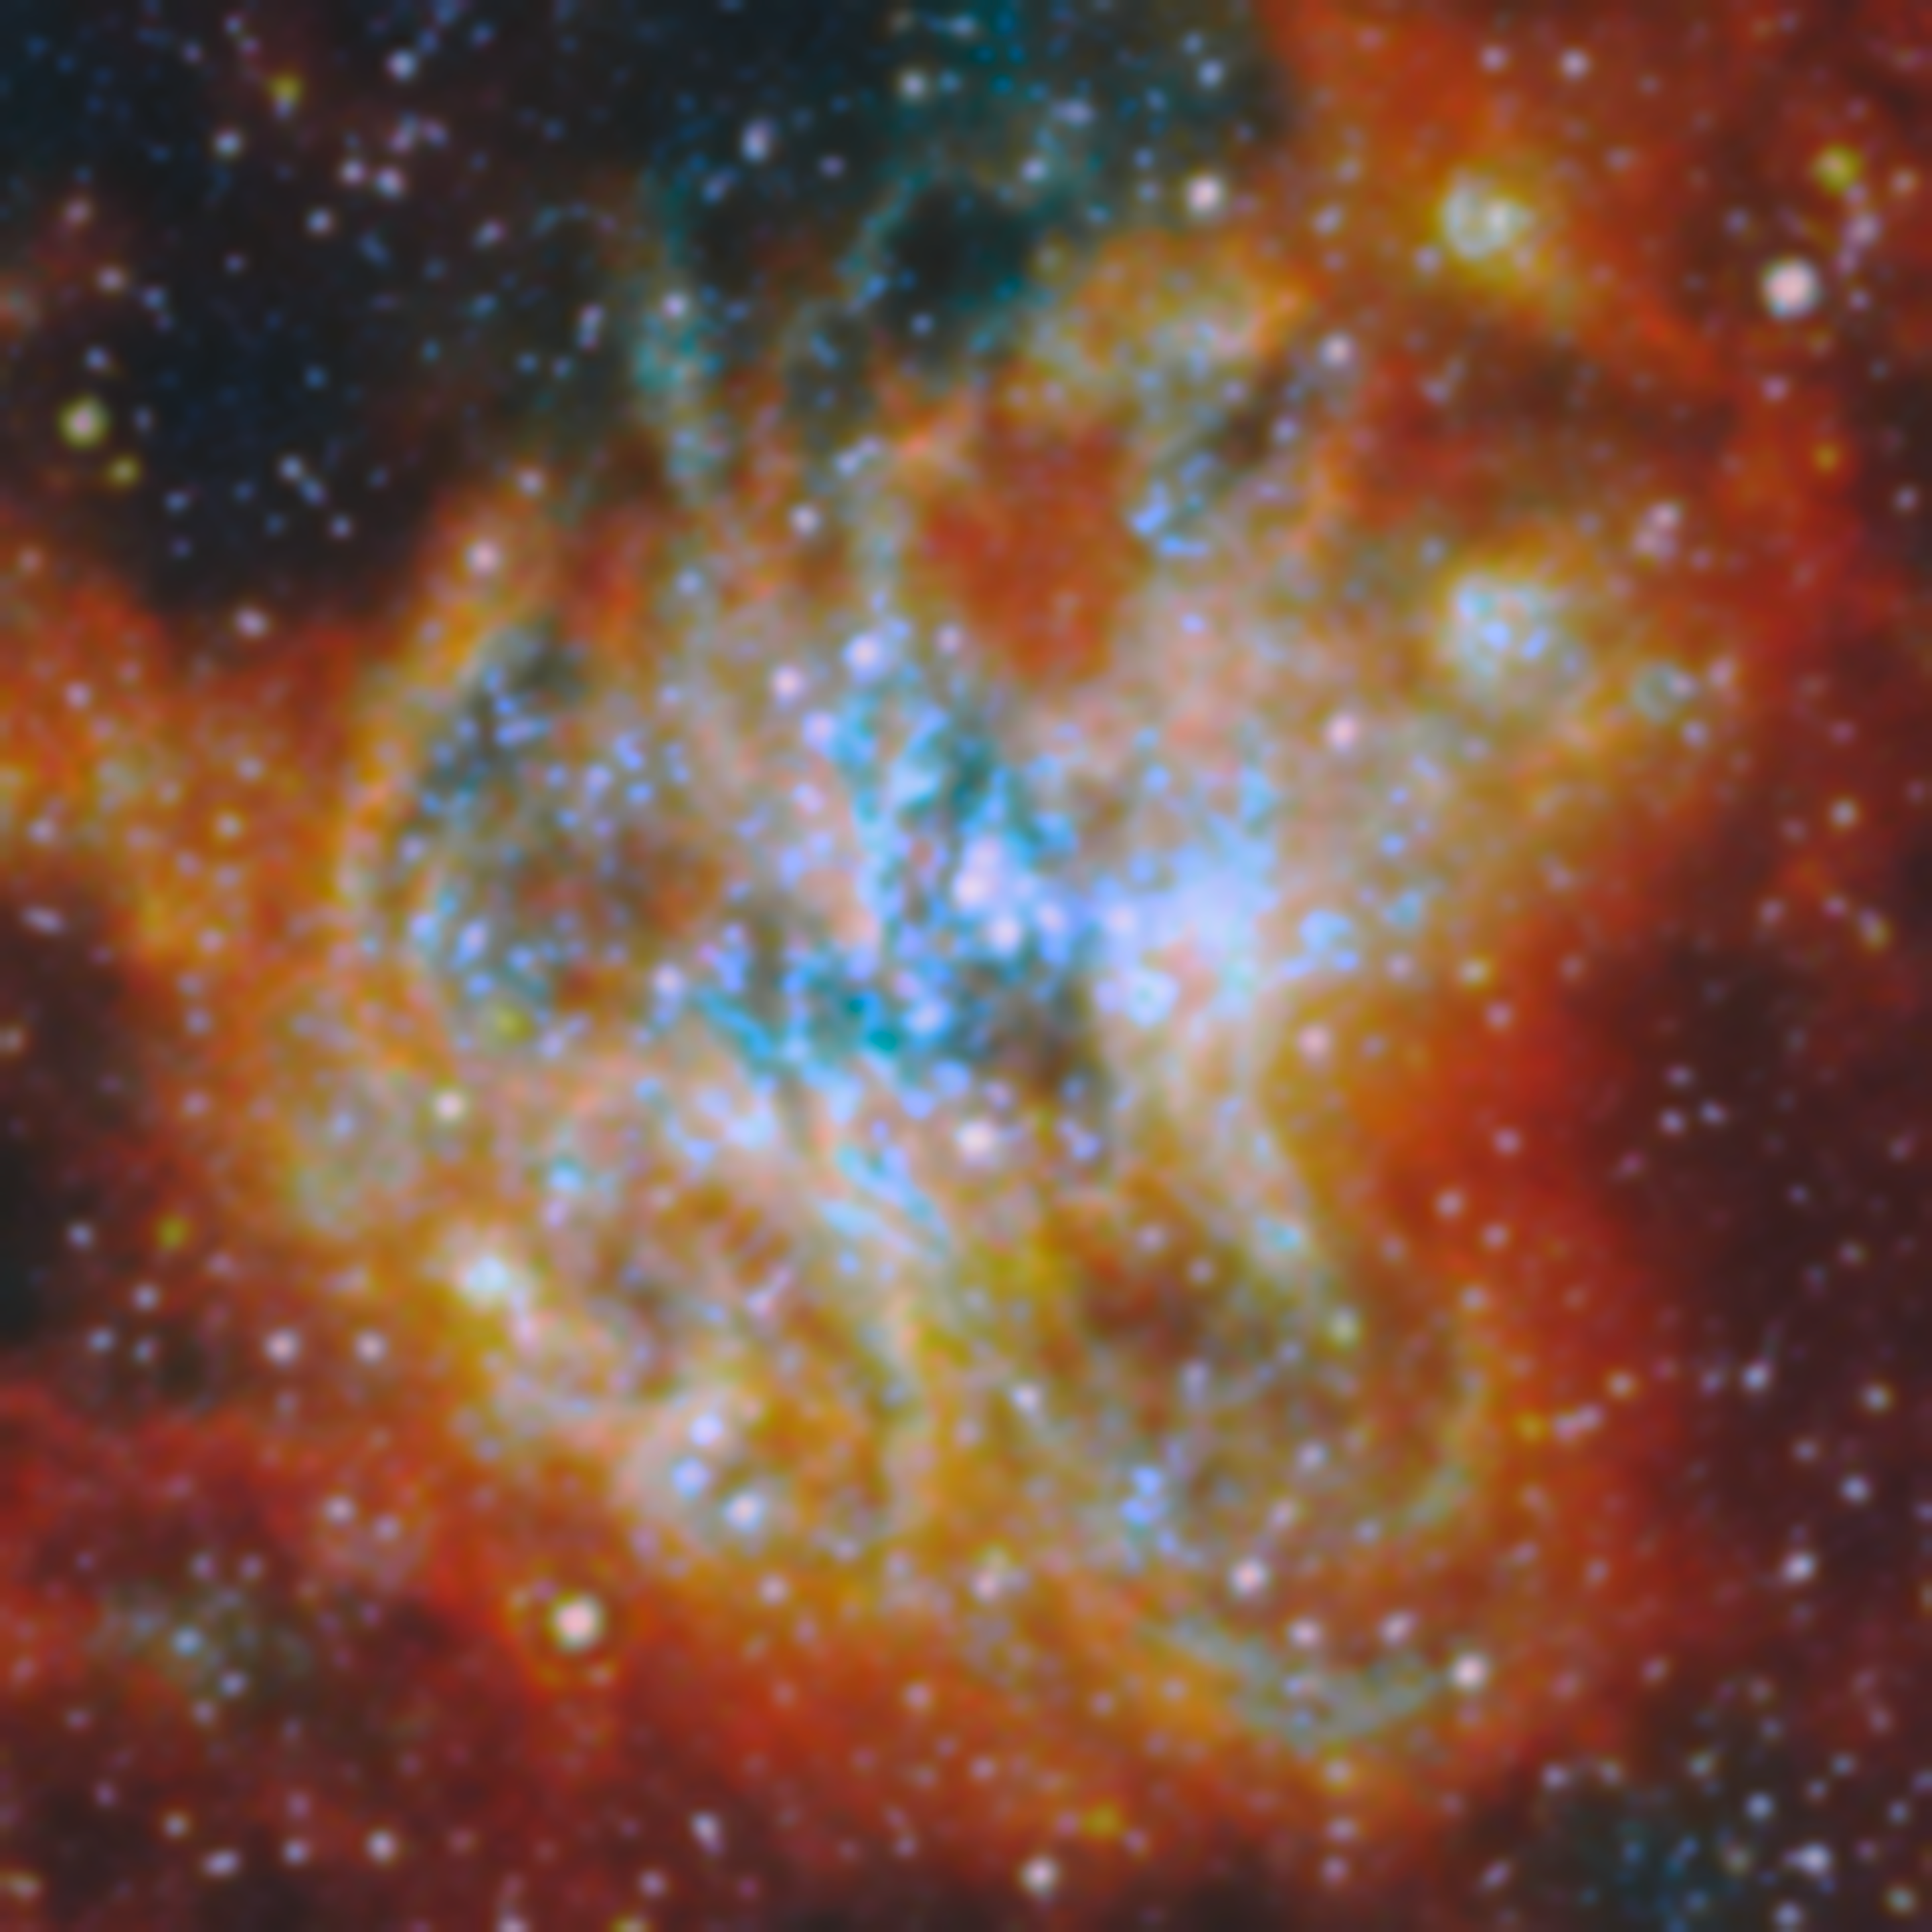

Star-forming region in M51 (close-up)

Astronomers have long known that understanding how star clusters come to be is key to unlocking other secrets of galactic evolution. Stars form in clusters, created when clouds of gas collapse under gravity. As more and more stars are born in a collapsing cloud, strong stellar winds, harsh ultraviolet radiation and the supernova explosions of massive stars eventually disperse the cloud, and their light can bear down on other star-forming regions in the galaxy. This process is called stellar feedback, and it means that most of the gas in a galaxy never gets used for star formation. Researching how star clusters develop can answer questions about star formation at a galactic scale.

Now, the state of the art has been further developed with both Hubble and Webb working together to provide a broad-spectrum view of thousands of young star clusters. An international team of astronomers has pored over images of four nearby galaxies from the FEAST observing programme (#1783), trying to solve this mystery. Their results show that it is the most massive star clusters that clear away their gaseous shroud the fastest, and begin lighting their galaxy the earliest.

The team identified nearly 9000 star clusters in the four galaxies in different evolutionary stages: young clusters just starting to emerge from their natal clouds of gas, clusters that had partially dispersed the gas (both from Webb images), and fully unobstructed clusters visible in optical light (found in Hubble images). With Webb’s ability to peer inside the gas clouds, they were able to then estimate the mass and age of each cluster from its light spectrum.

This image shows a star-forming complex in Messier 51 (M51), measuring almost 800 light-years across. M51 is located about 27 million light-years away from Earth. The thick cloud of star-forming gas, in which clumps collapsed to form each of the individual star clusters, is shown here in red and orange colours that represent infrared light emitted by ionised gas, dust grains, and complex molecules such as polycyclic aromatic hydrocarbons (PAHs).

Many of the bright dots that can be seen within the clouds are star clusters. The massive young stars within cast powerful radiation on the gas clouds that surround them, creating the cyan illumination shown here. Eventually, the combination of radiation, stellar wind and the supernova explosions of the most massive of these stars will disperse the gas clouds, putting an end to the star formation in this part of M51.

Credit: ESA/Webb, NASA & CSA, A. Pedrini, A. Adamo (Stockholm University) and the FEAST JWST team